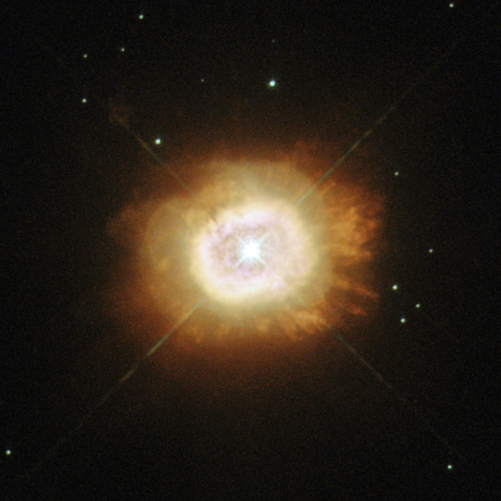

A smouldering star

This new image, snapped by NASA/ESA Hubble Space Telescope, shows the star HD 184738, also known as Campbell’s hydrogen star. It is surrounded by plumes of reddish gas — the fiery red and orange hues are caused by glowing gases, including hydrogen and nitrogen.

HD 184738 is at the centre of a small planetary nebula. The star itself is known as a [WC] star, a rare class resembling their much more massive counterparts — Wolf-Rayet stars. These stars are named after two French astronomers, Charles Wolf and Georges Rayet, who first identified them in the mid-nineteenth century.

Wolf-Rayet stars are hot stars, perhaps 20 times more massive than the Sun, that are rapidly blowing away material and losing mass. [WC] stars are rather different: they are low-mass Sun-like stars at the end of their lives. While these stars have recently ejected much of their original mass, the hot stellar core is still losing mass at a high rate, creating a hot wind. It is these winds that cause them to resemble Wolf-Rayet stars.

However, astronomers can look more closely at the composition of these winds to tell the stars apart; [WC] stars are identified by the carbon and oxygen in their winds. Some true Wolf-Rayet stars are rich in nitrogen instead, but this is very rare among their low-mass counterparts.

HD 184738 is also very bright in the infrared part of the spectrum, and is surrounded by dust very similar to the material that the Earth formed from. The origin of this dust is uncertain.

A version of this image was entered into the Hubble’s Hidden Treasures image processing competition by contestant Jean-Christophe Lambry.

This caption was revised on 18/09/2013 to more accurately describe this image.

Credit: ESA/Hubble & NASA Acknowledgement: Jean-Christophe Lambry